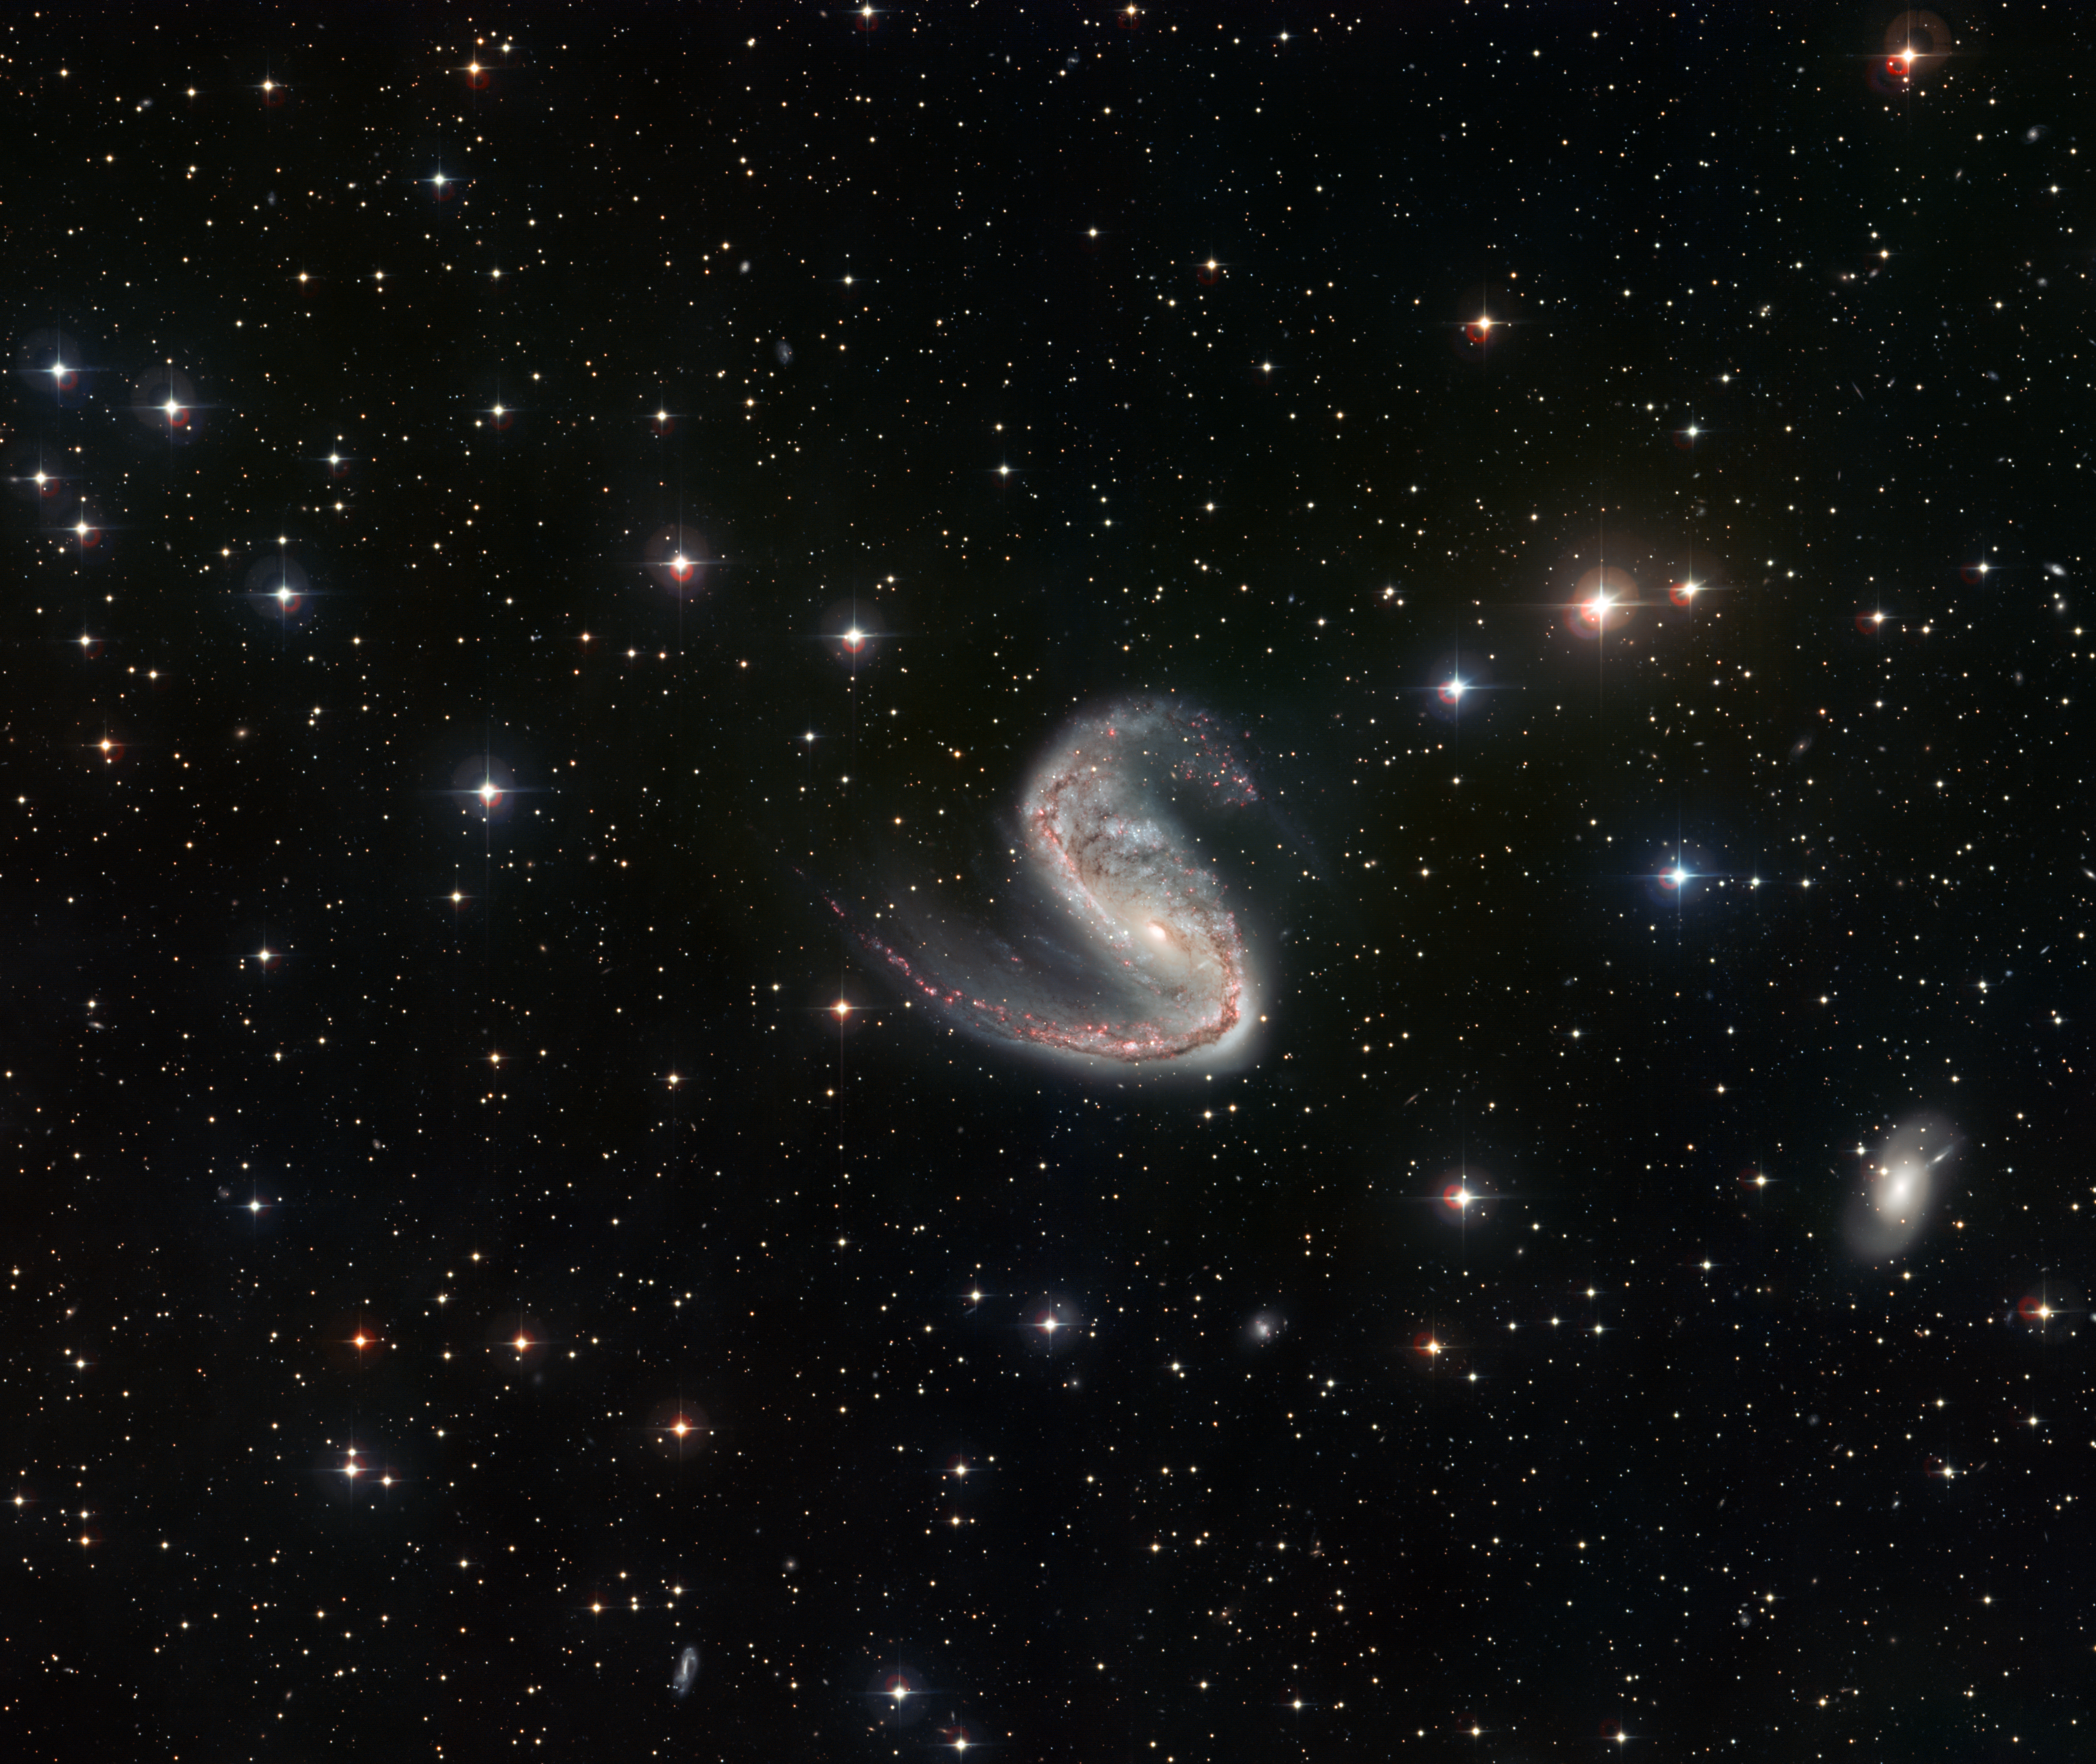

Wide-field view of the Meathook Galaxy

This picture of the Meathook Galaxy (NGC 2442) was taken by the Wide Field Imager on the MPG/ESO 2.2-metre telescope at La Silla, Chile. It shows a much broader view than the Hubble image, although less detailed. This view includes the whole galaxy and the surrounding sky, and clearly shows the asymmetric spiral arms. The longer of the two arms has intense star formation, which is visible here as a pink glow: this is due to the radiation of young stars ionising the gas they form from. The asymmetric shape and star formation are both thought to be caused by tidal disruptions from a near-miss with another galaxy at some point in its history

Credit: ESO